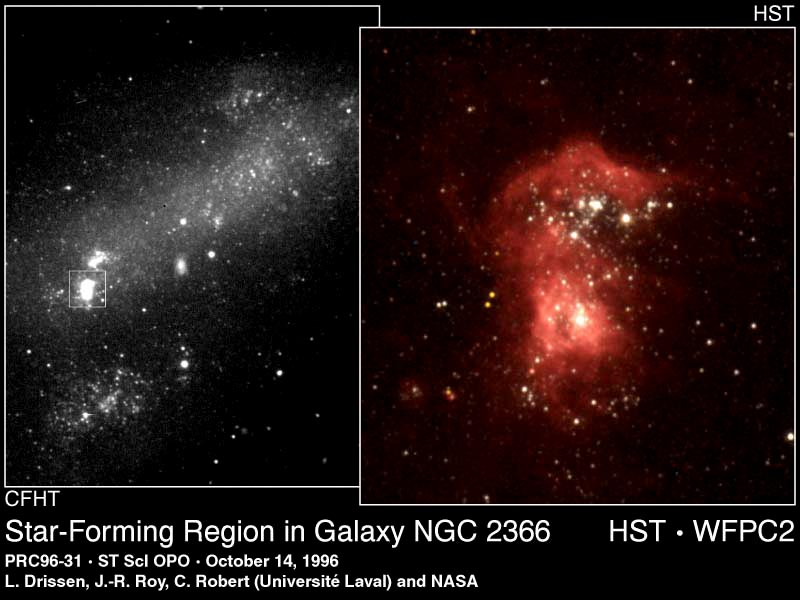

Star-Forming Region in Galaxy NGC 2366

Clusters of stars and a fishhook-shaped cloud of luminescent gases glow brilliantly in NGC 2363, a giant star-forming region in the Magellanic galaxy NGC 2366. Even though the nebula is 10 million light-years away, the Hubble Space Telescope resolves details comparable to such nebulae in our own galaxy. This region is as bright as the gigantic 30 Doradus nebula in the Large Magellanic Cloud, a satellite galaxy to our Milky Way.

Credit: Laurent Drissen, Jean-Rene Roy, Carmelle Robert, Yvan Dutil, CHFT and NASA/ESA